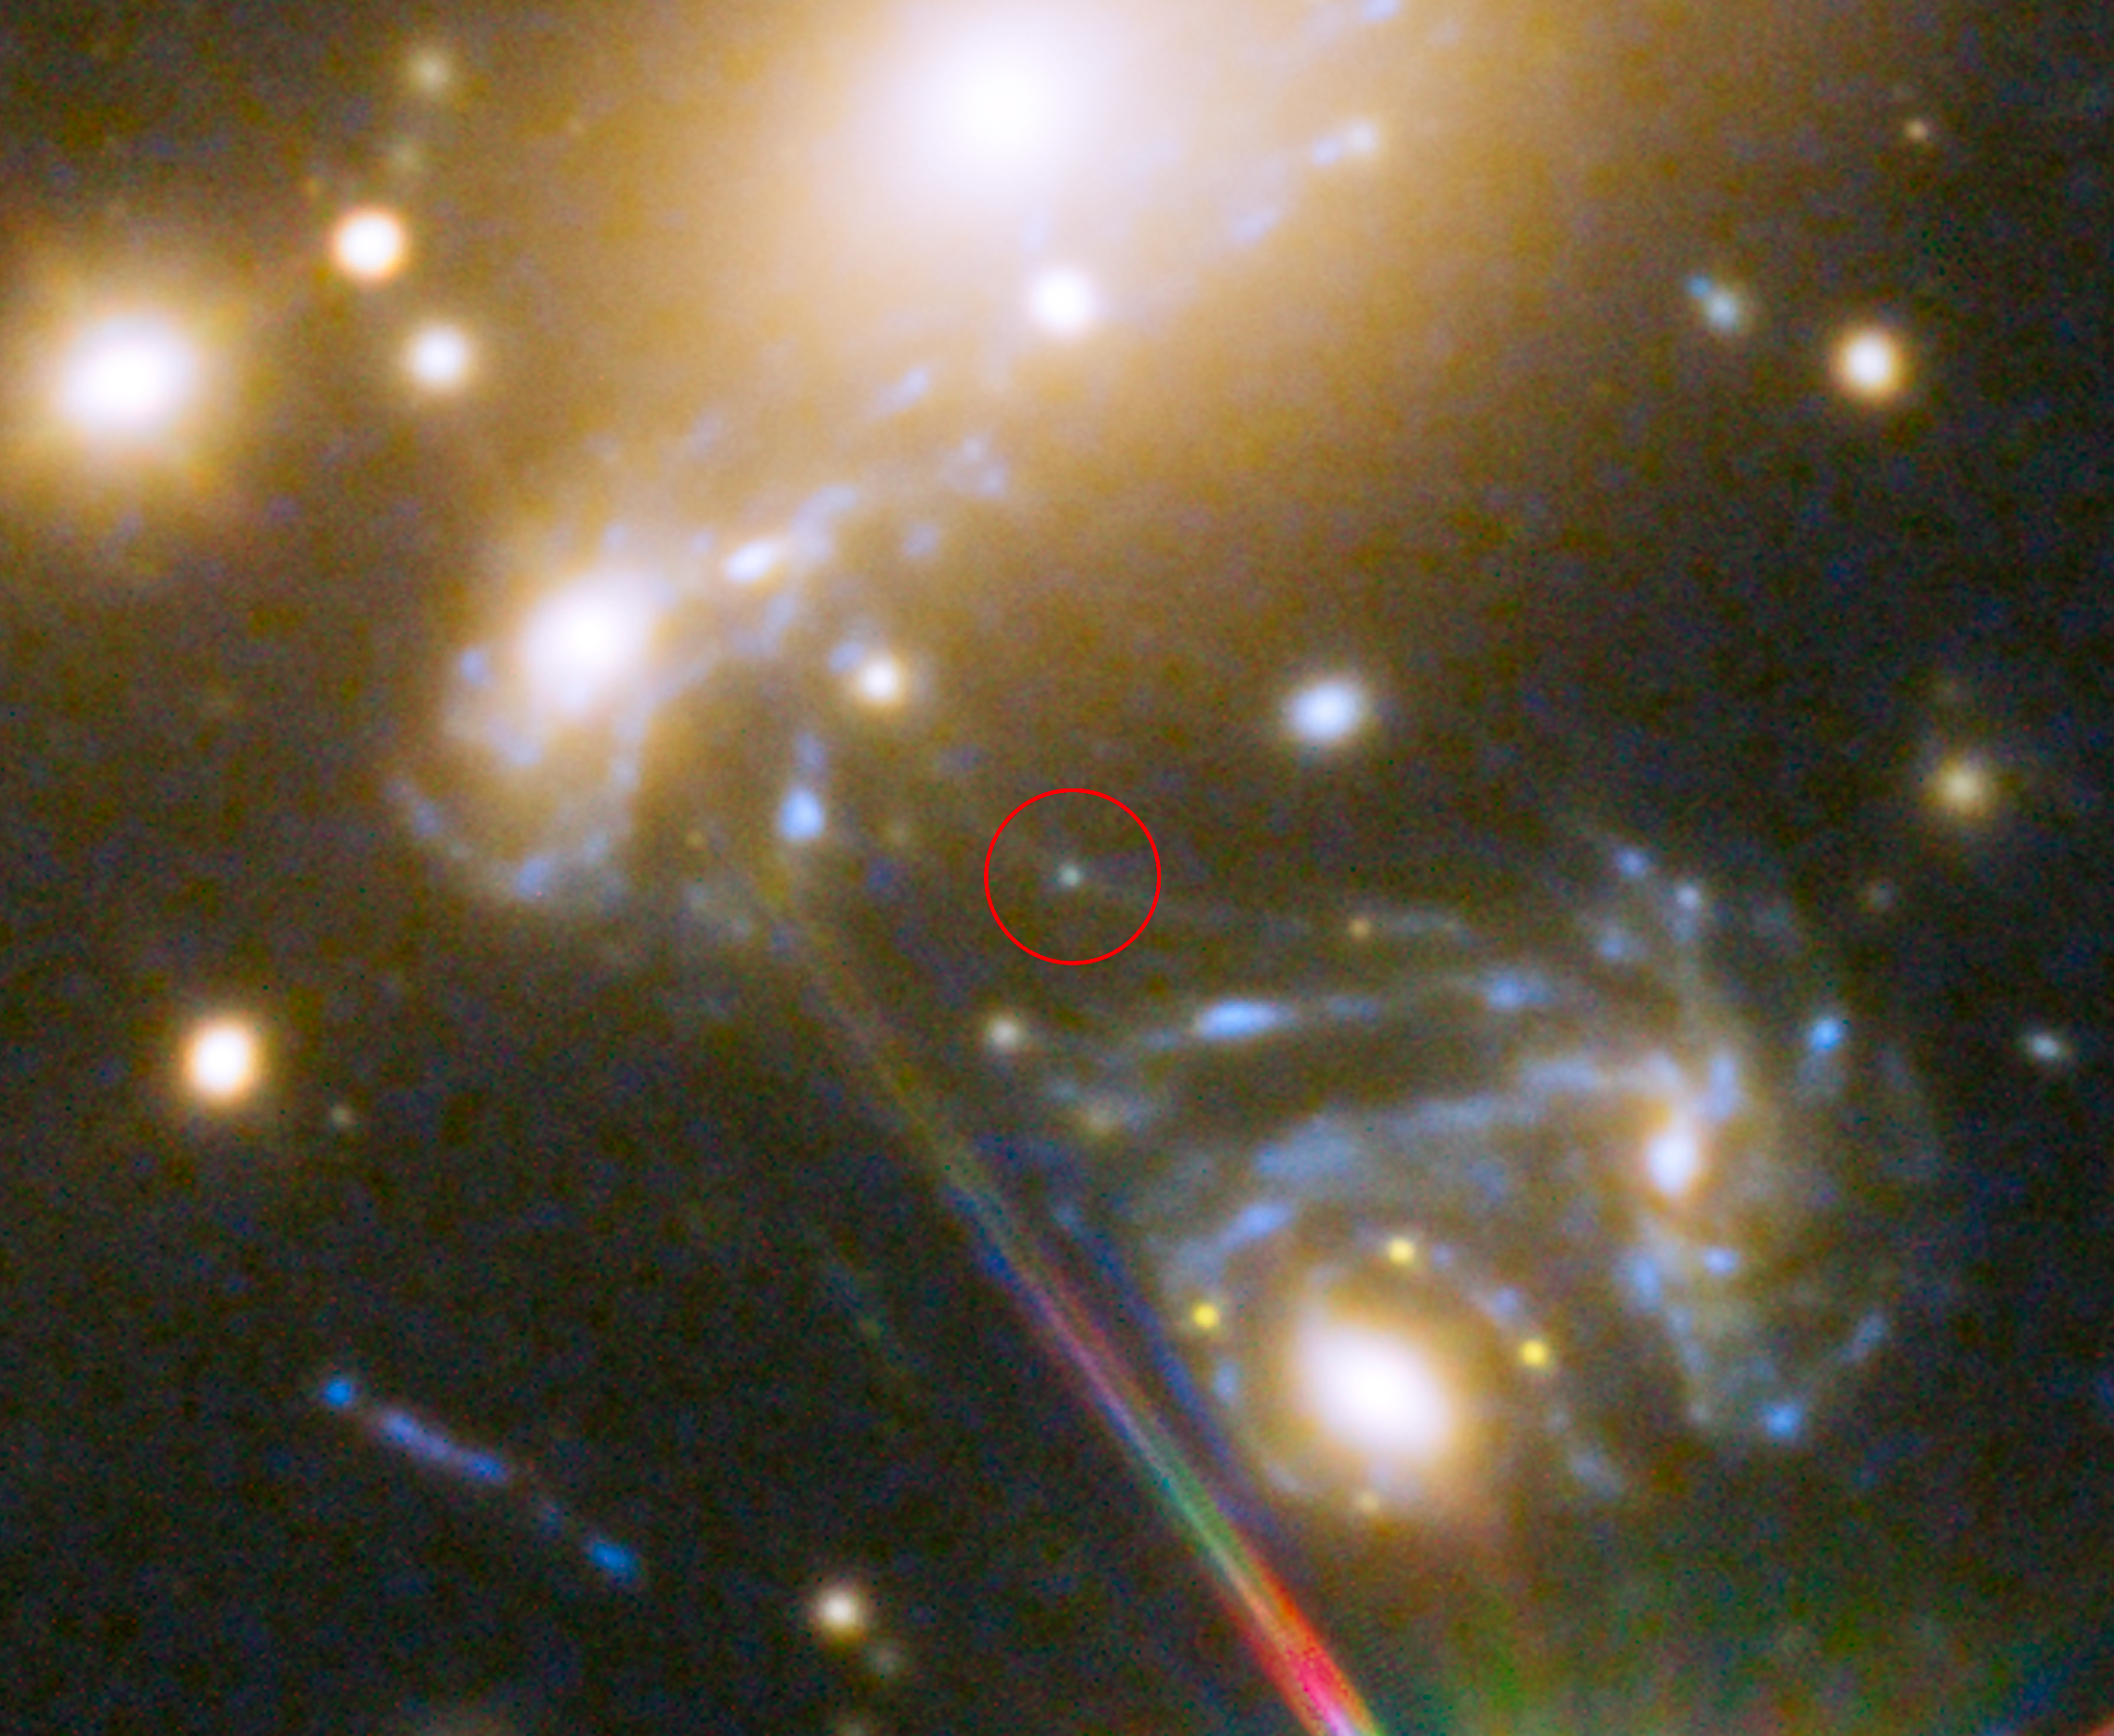

Lensed star in the cluster MACS j1149.5+223

This image shows the the huge galaxy cluster MACS J1149.5+223, whose light has taken over 5 billion years to reach us.

Highlighted is the position where the star LS1 appeared — its image magnified by a factor 2000 by gravitational microlensing. The galaxy in which the star is located can be seen three times on the sky — multiplied by strong gravitational lensing.

Credit: NASA, ESA, S. Rodney (John Hopkins University, USA) and the FrontierSN team; T. Treu (University of California Los Angeles, USA), P. Kelly (University of California Berkeley, USA) and the GLASS team; J. Lotz (STScI) and the Frontier Fields team; M. Postman (STScI) and the CLASH team; and Z. Levay (STScI)